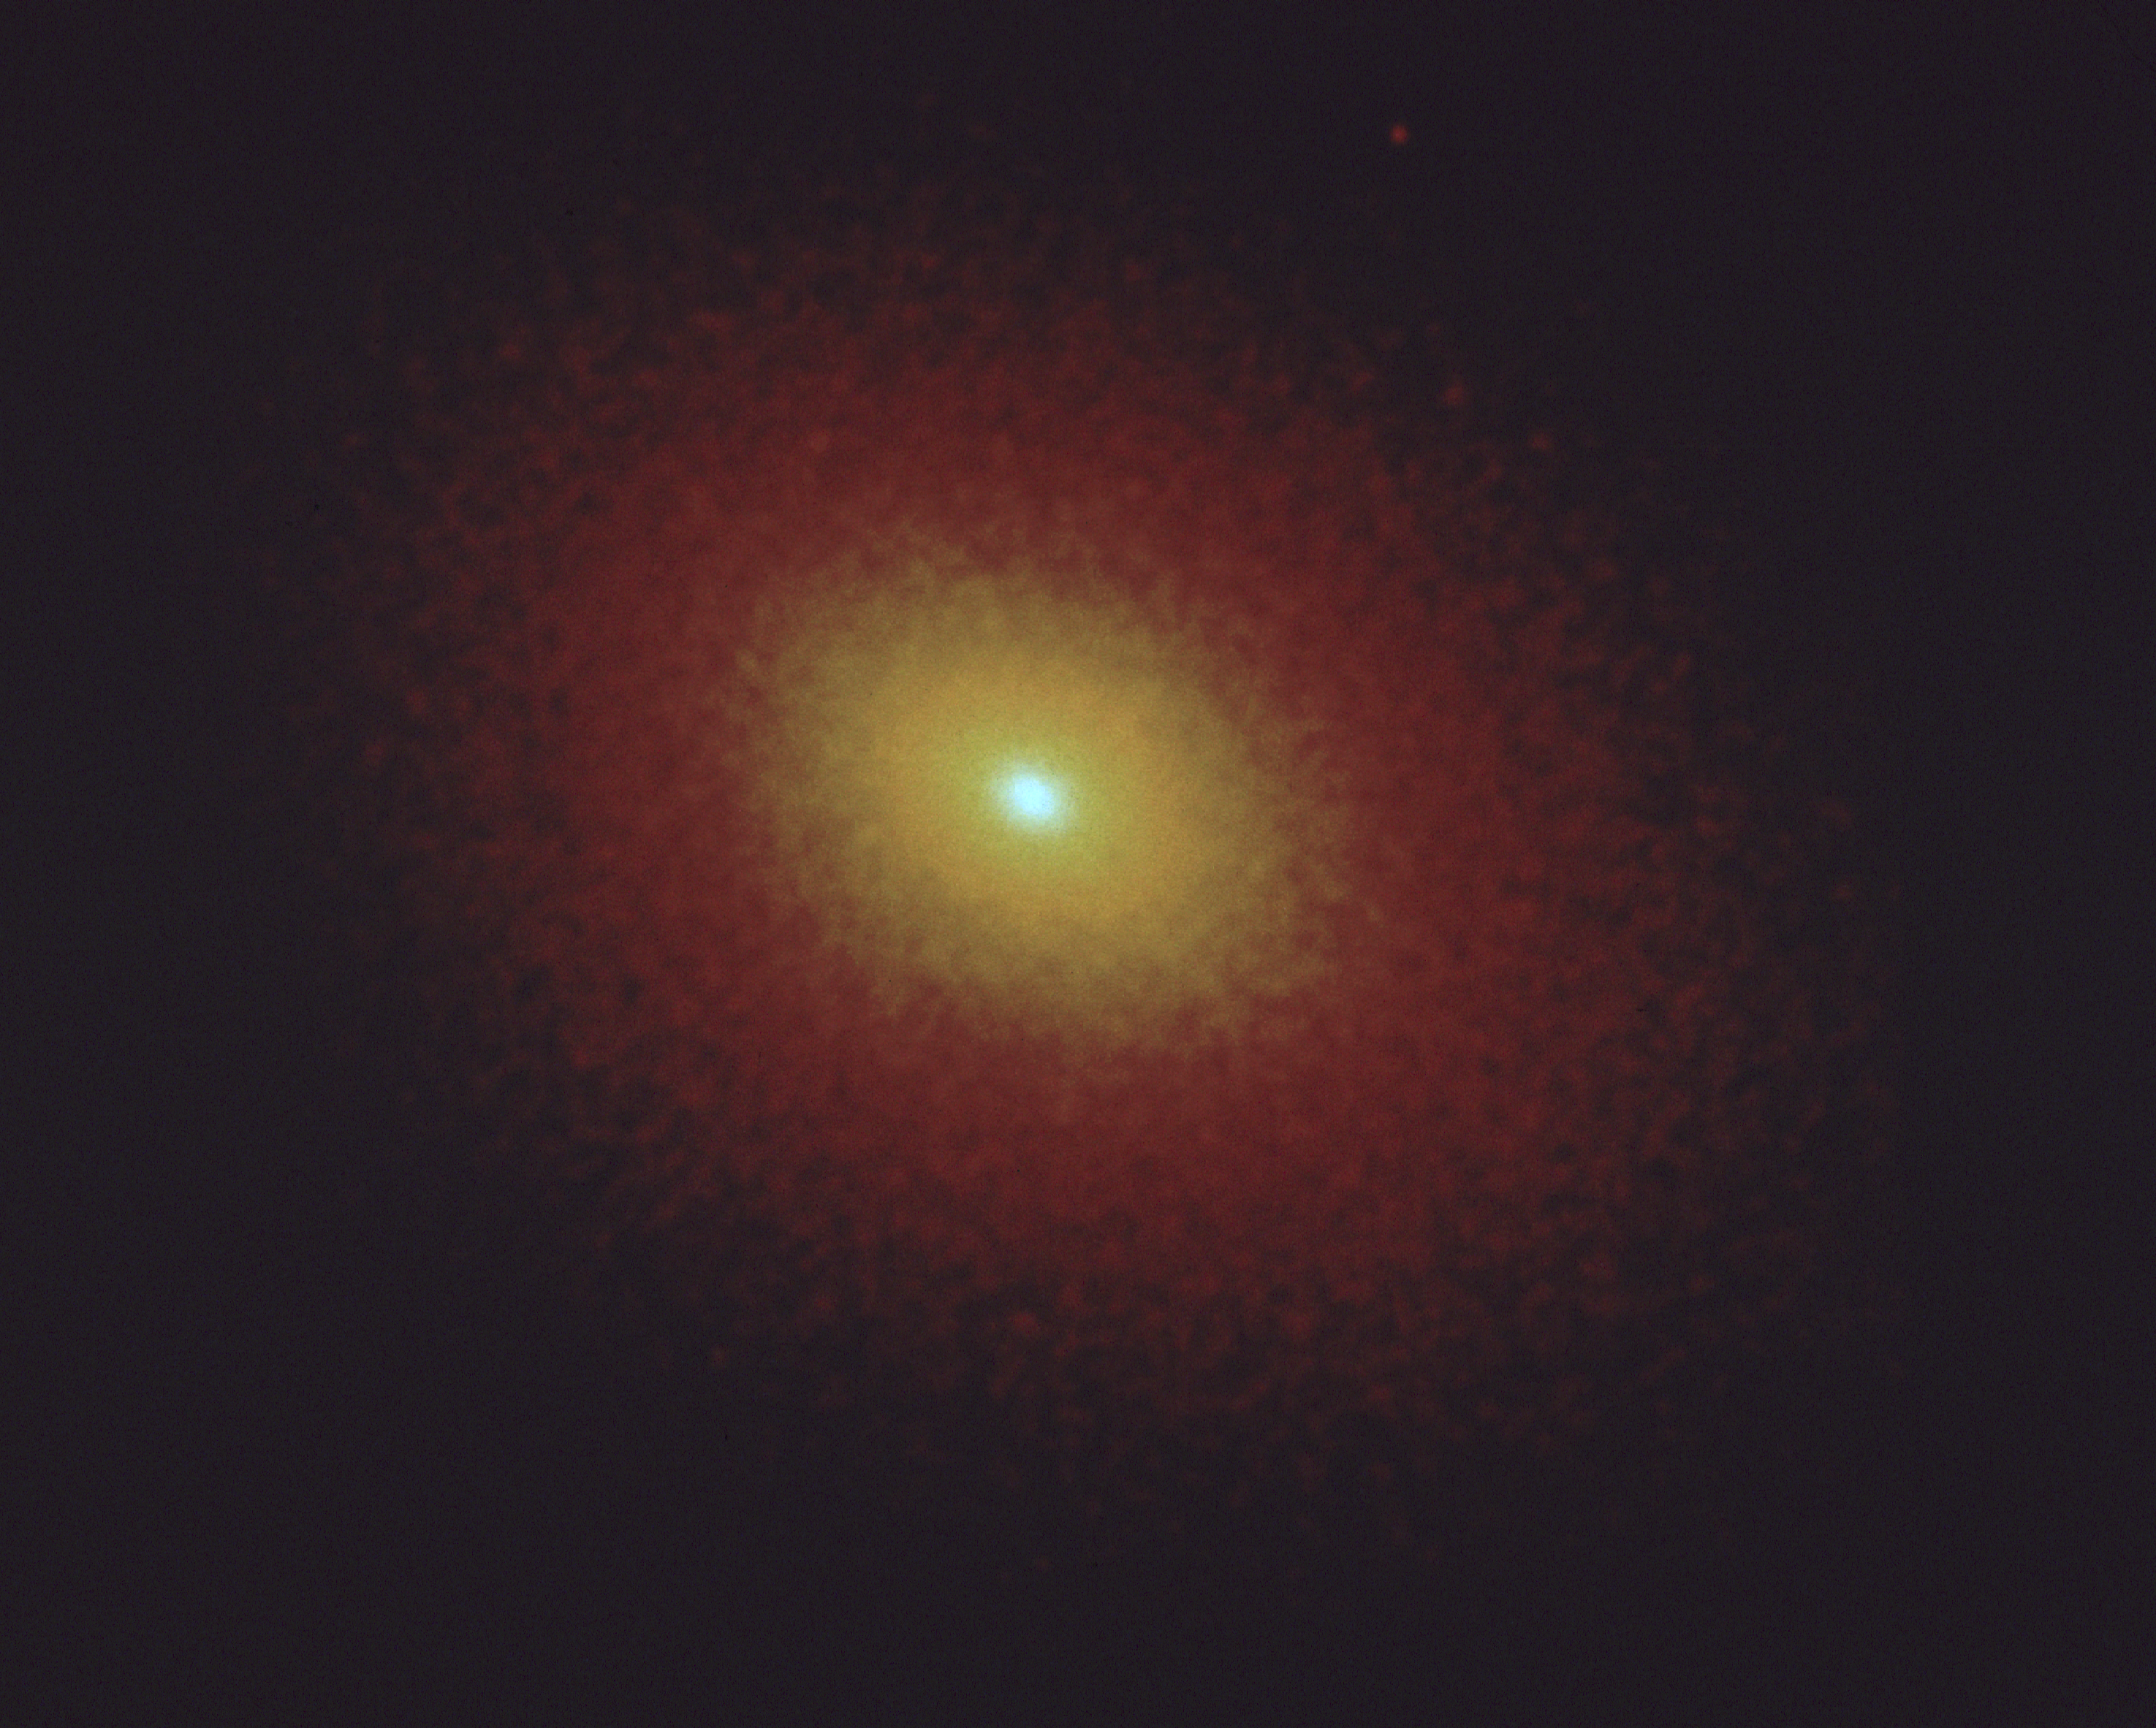

Compact core of galaxy M32

NASA/ESA Hubble Space Telescope clearly shows the central core of the elliptical galaxy M32. This green-light image was taken with HST's Wide Field and Planetary Camera (WPIPC), in high resolution mode, on August 17, 1991.

The steady increase in brightness of M32 towards its center is readily apparent in the image, showing that the stars in M32 are strongly concentrated towards its nucleus, as if drawn into the center and held there by the gravitational field of a massive black hole. Theoretical models suggest that the structure of M32 is consistent with a central 3 million solar mass black hole.

Credit: Tod R. Lauer/NASA/ESA